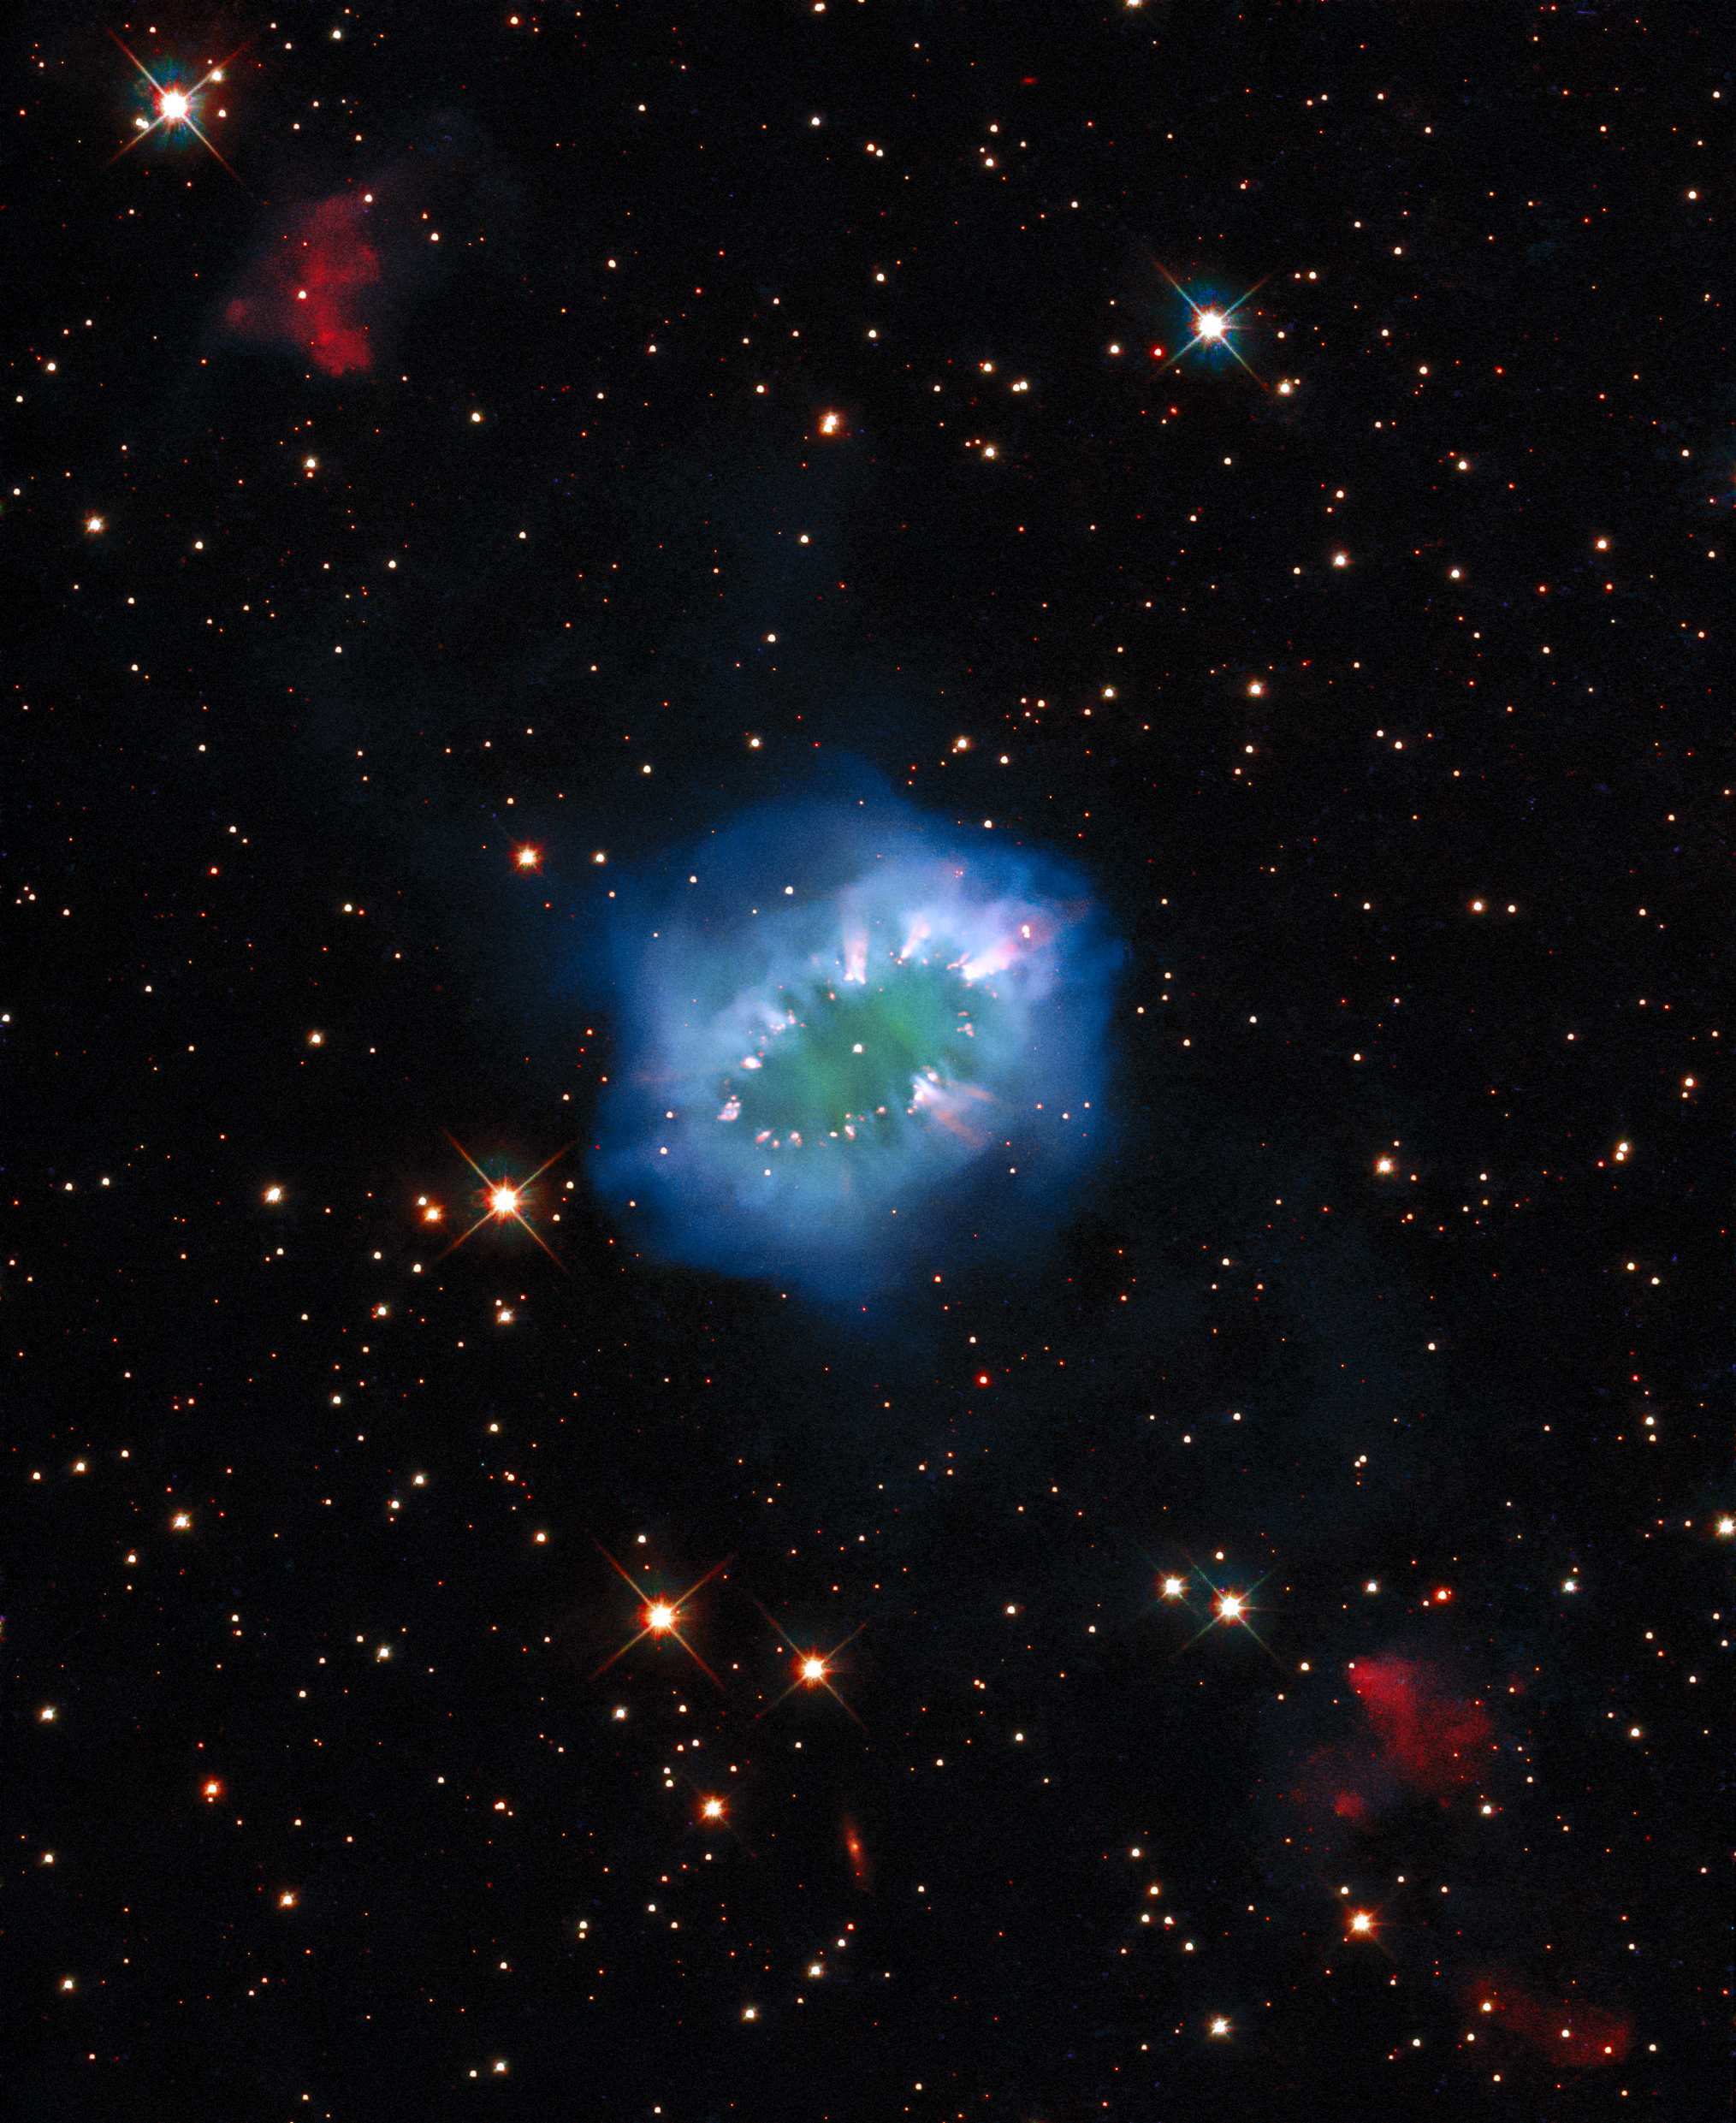

In the Sky with Diamonds

The interaction of two doomed stars has created this spectacular ring adorned with bright clumps of gas — a diamond necklace of cosmic proportions. Fittingly known as the Necklace Nebula, this planetary nebula is located 15 000 light-years away from Earth in the small, dim constellation of Sagitta (The Arrow).

The Necklace Nebula — which also goes by the less glamorous name of PN G054.2-03.4 — was produced by a pair of tightly orbiting Sun-like stars. Roughly 25 000 years ago, one of the aging stars expanded and engulfed its smaller companion, creating something astronomers call a “common envelope”. The smaller star continued to orbit inside its larger companion, increasing the bloated giant’s rotation rate until large parts of it spun outwards into space. This escaping ring of debris formed the Necklace Nebula, with particularly dense clumps of gas forming the bright “diamonds” around the ring.

The pair of stars which created the Necklace Nebula remain so close together — separated by only a few million kilometres — that they appear as a single bright dot in the centre of this image. Despite their close encounter the stars are still furiously whirling around each other, completing an orbit in just over a day.

The Necklace Nebula was featured in a previously released Hubble image, but now this new image has been created by applying advanced processing techniques, making for a new and improved view of this intriguing object. The composite image includes several exposures from Hubble’s Wide Field Camera 3.

Editor's note (March 2024): The figure "25 000 years ago" was corrected from 10 000 years.

Credit: ESA/Hubble & NASA, K. Noll